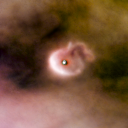

206-446

One of 42 new proplyds discovered in the Orion Nebula, 206-446 is one of the bright proplyds that lies relatively close to the nebula’s brightest star, Theta 1 Orionis C. Resembling a head with a ponytail extending from it, this proplyd’s strange shape can be attributed to a jet of matter flowing away from its centre.

Credit: NASA/ESA and L. Ricci (ESO)